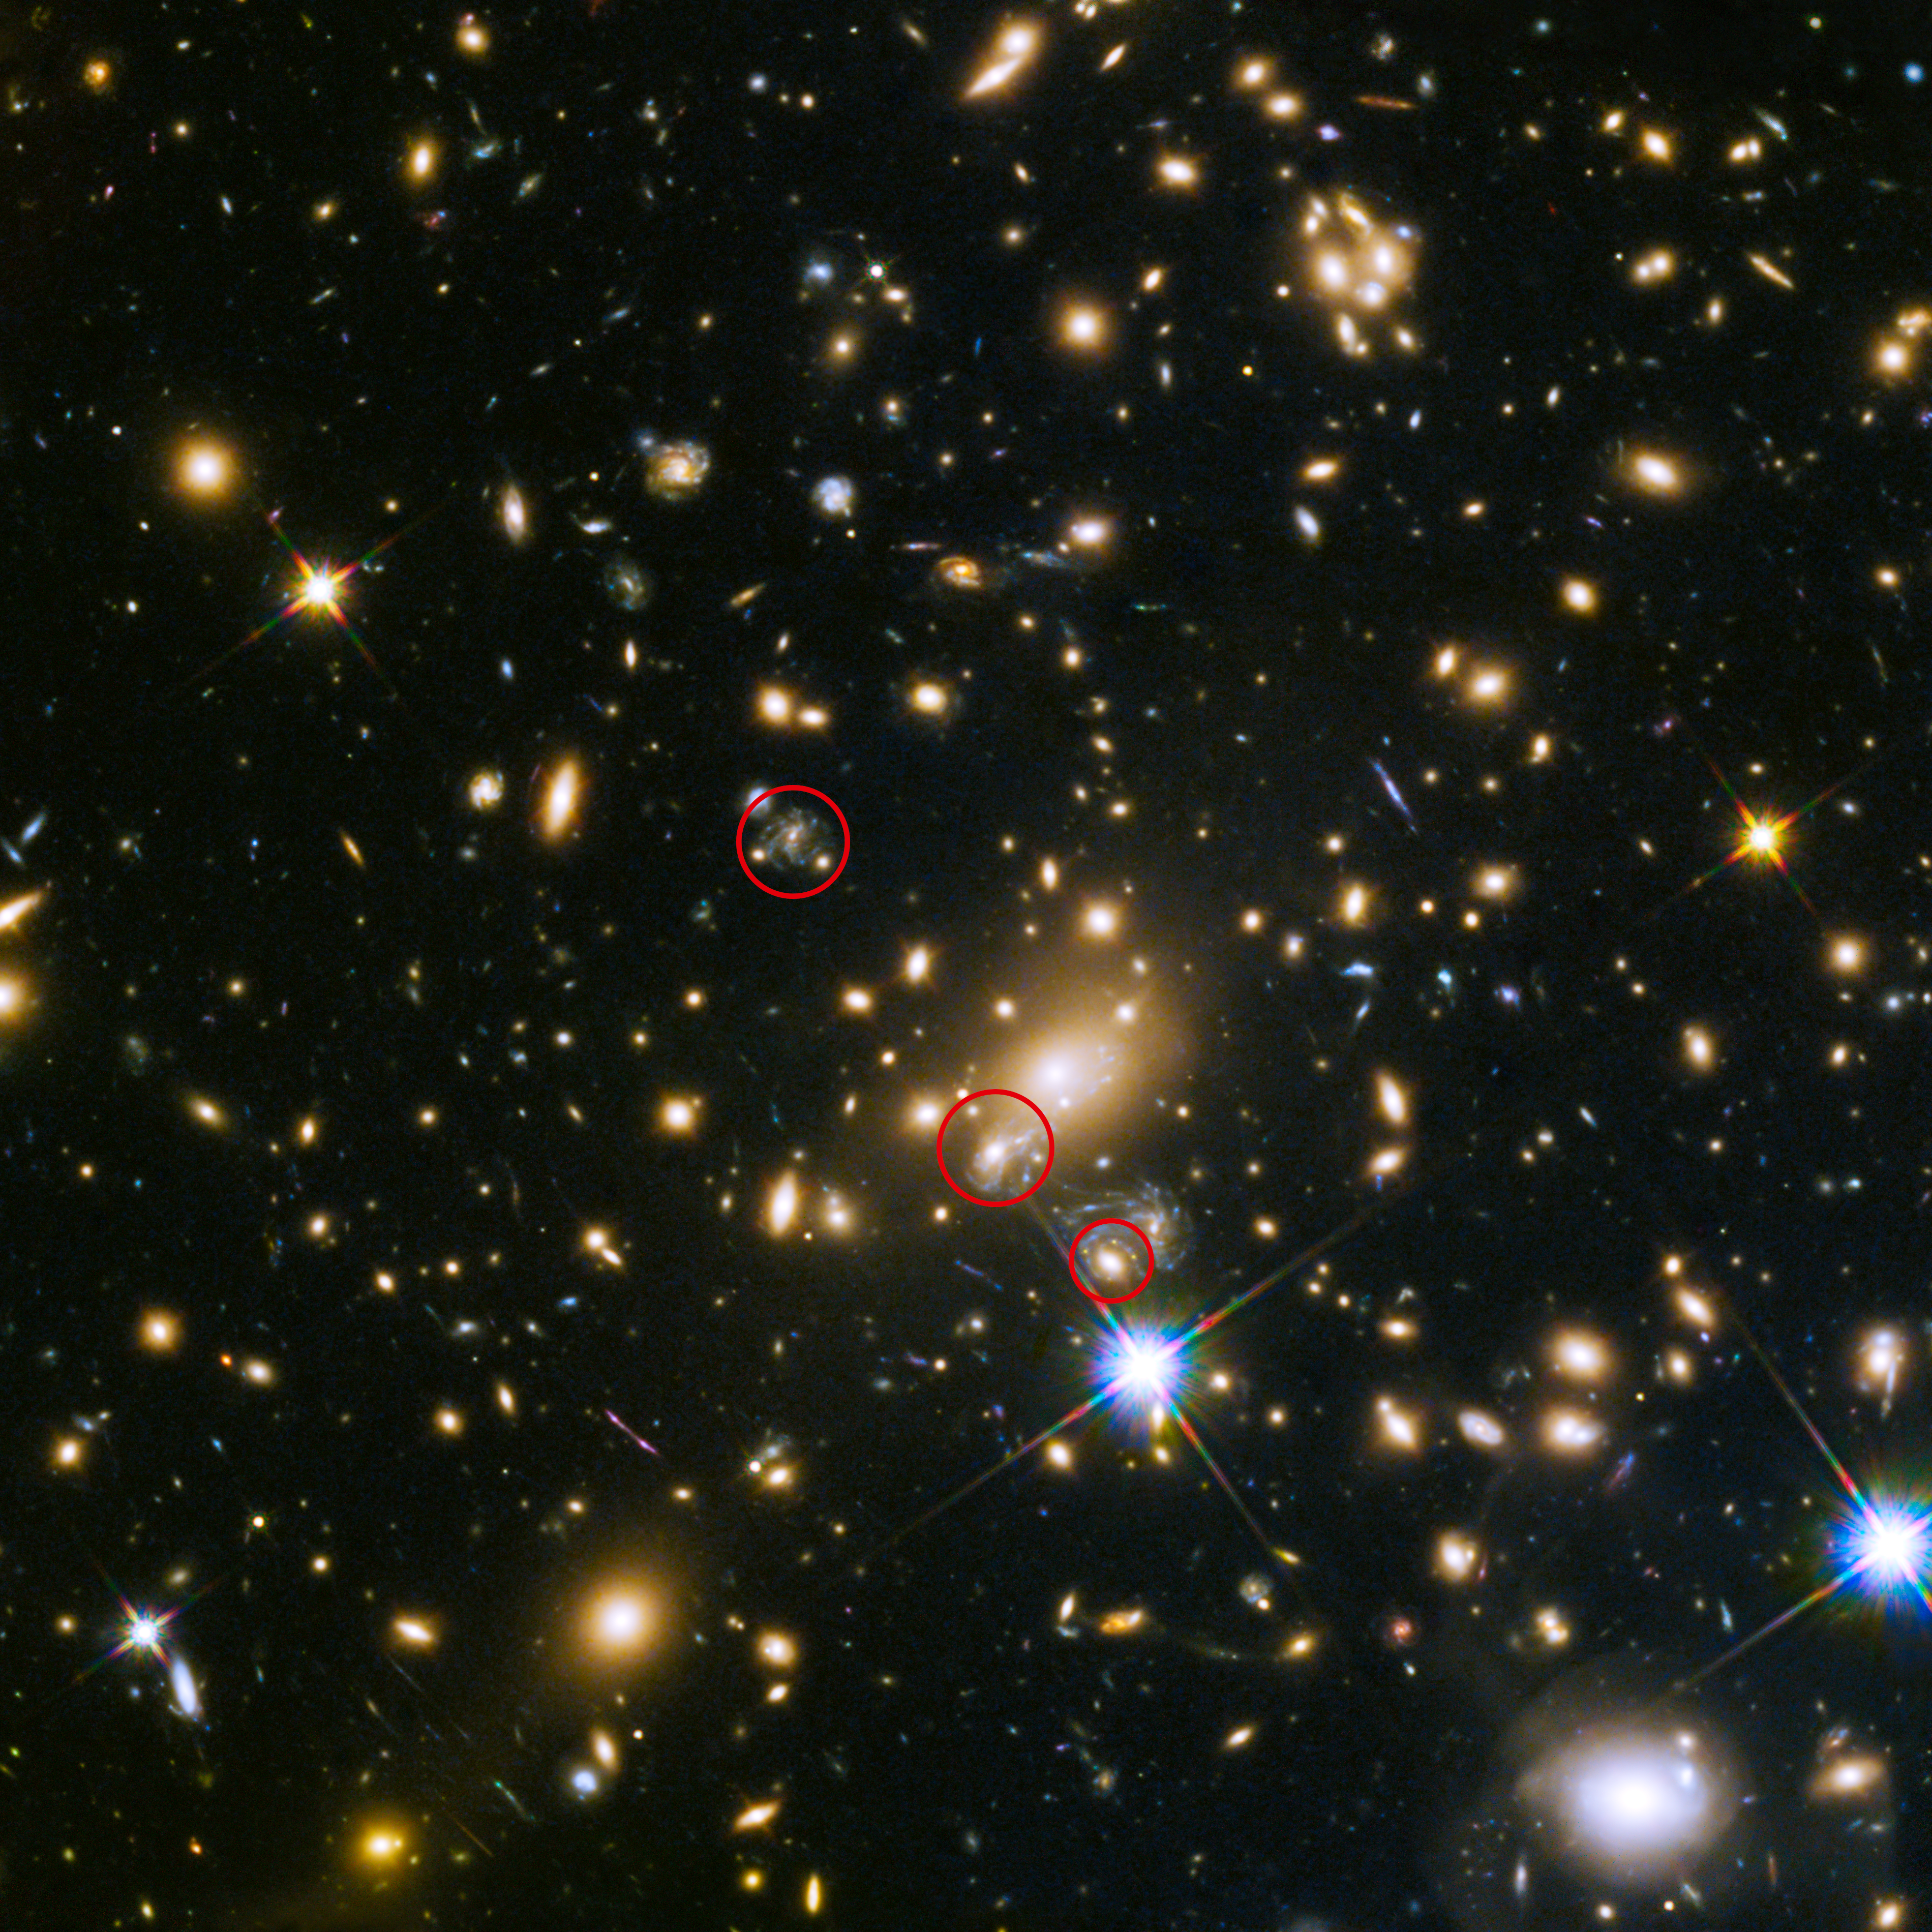

Appearance of the the Refsdal supernova

This image shows the appearances of the Refsdal supernova. The uppermost circle shows the position of the supernova as it could have been seen in 1998. The lowermost circle shows the galaxy which lensed the supernova four time — a discovery made in late 2014. The middle circle shows the latest position of the reappearing supernova in 2015.

Credit: NASA, ESA, S. Rodney (John Hopkins University, USA) and the FrontierSN team; T. Treu (University of California Los Angeles, USA), P. Kelly (University of California Berkeley, USA) and the GLASS team; J. Lotz (STScI) and the Frontier Fields team; M. Postman (STScI) and the CLASH team; and Z. Levay (STScI)